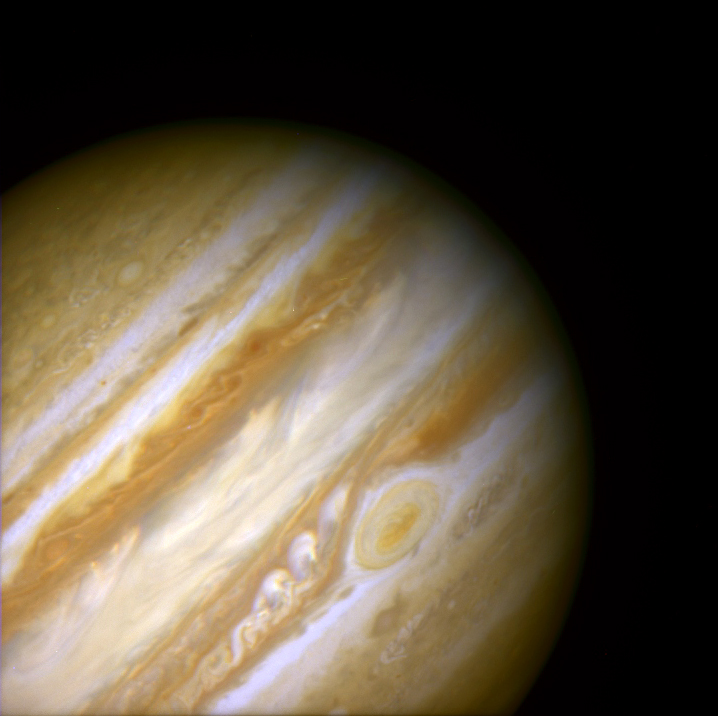

Jupiter's Great Red Spot

When 17th-century astronomers first turned their telescopes to Jupiter, they noted a conspicuous reddish spot on the giant planet. This Great Red Spot is still present in Jupiter's atmosphere, more than 300 years later. It is now known that it is a vast storm, spinning like a cyclone. Unlike a low-pressure hurricane in the Caribbean Sea, however, the Red Spot rotates in a counterclockwise direction in the southern hemisphere, showing that it is a high-pressure system. Winds inside this Jovian storm reach speeds of about 270 mph.

Credit: Hubble Heritage Team (STScI/AURA/NASA/ESA) and Amy Simon (Cornell U.)